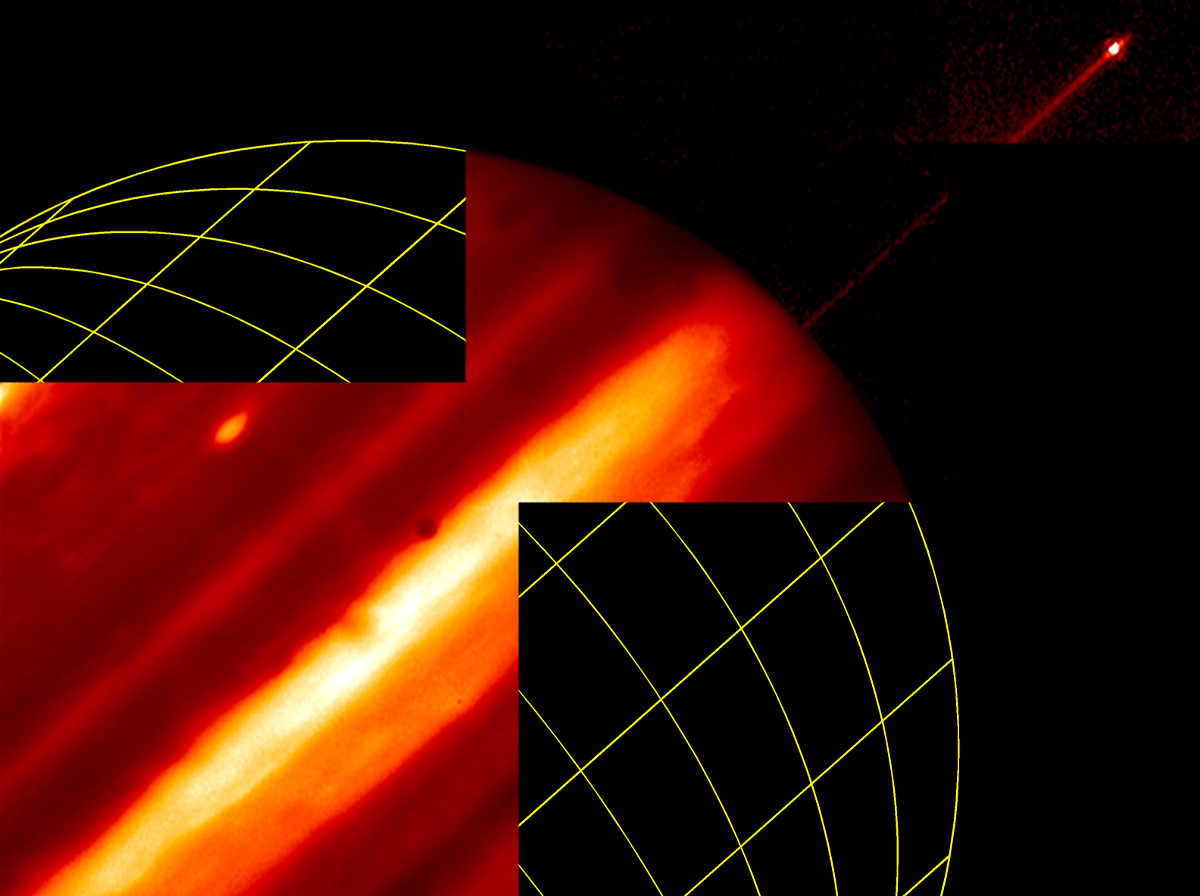

Hubble provides infrared view of moon, ring and clouds

Probing Jupiter's atmosphere for the first time, the Hubble Space Telescope's new Near Infrared Camera and Multi-Object Spectrometer(NICMOS) provides a sharp glimpse of the planet's ring, moon, and high-altitude clouds.

Credit: Reta Beebe (New Mexico State University), and NASA/ESA